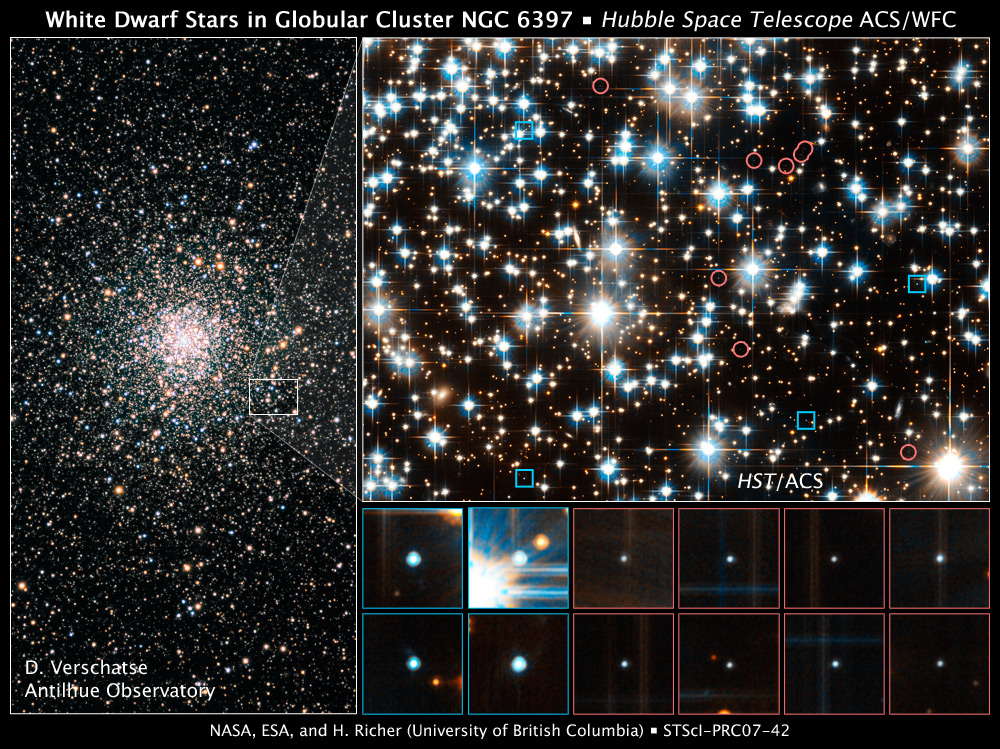

Hubble finds young white dwarfs on the fast track

These images show young and old white dwarf stars – the burned-out relics of normal stars – in the ancient globular star cluster NGC 6397.

The image at left, taken by a ground-based telescope, shows the dense swarm of hundreds of thousands of stars that make up the globular cluster. The white box outlines the location of the observations made by the NASA/ESA Hubble Space Telescope.

The image at top right, taken by Hubble's Advanced Camera for Surveys, reveals young white dwarfs less than 800 million years old and older white dwarfs between 1.4 and 3.5 billion years old. The photo shows 12 of the 84 white dwarfs in the Hubble study. The blue squares pinpoint the young white dwarfs; the red circles outline the older white dwarfs. The Hubble researchers distinguished the younger from the older white dwarfs based on their colour and brightness. The younger white dwarfs are hotter and therefore bluer and brighter than the older ones.

The astronomers were surprised to find young white dwarfs far away from the cluster's core. They had assumed that the youngsters would reside at the centre and migrate over time to the cluster's outskirts. The astronomers proposed that the cluster stars that burn out as white dwarfs are given a boost that propels them to the edge of the cluster.

Close-up images of the white dwarfs are shown at bottom right. The blue boxes represent the young white dwarfs; the red boxes indicate the older white dwarfs.

The ground-based image was taken June 5, 2005. The Hubble images were taken in March and April 2005.

Credit for ground-based image: D. Verschatse (Antilhue Observatory, Chile)

Credit for Hubble images: NASA, ESA, and H. Richer (University of British Columbia)

Other members of the team are S. Davis (University of British Columbia); I.R. King (University of Washington, Seattle); J. Anderson (Space Telescope Science Institute, Baltimore, Md.); J. Coffey (University of British Columbia, Vancouver); G.G. Fahlman (NRC Herzberg Institute of Astrophysics, National Research Council Canada, Saanich, British Columbia); J. Hurley (Swinburne University of Technology, Hawthorn, Australia); and J.S. Kalirai (University of California at Santa Cruz).

Credit: NASA & ESA